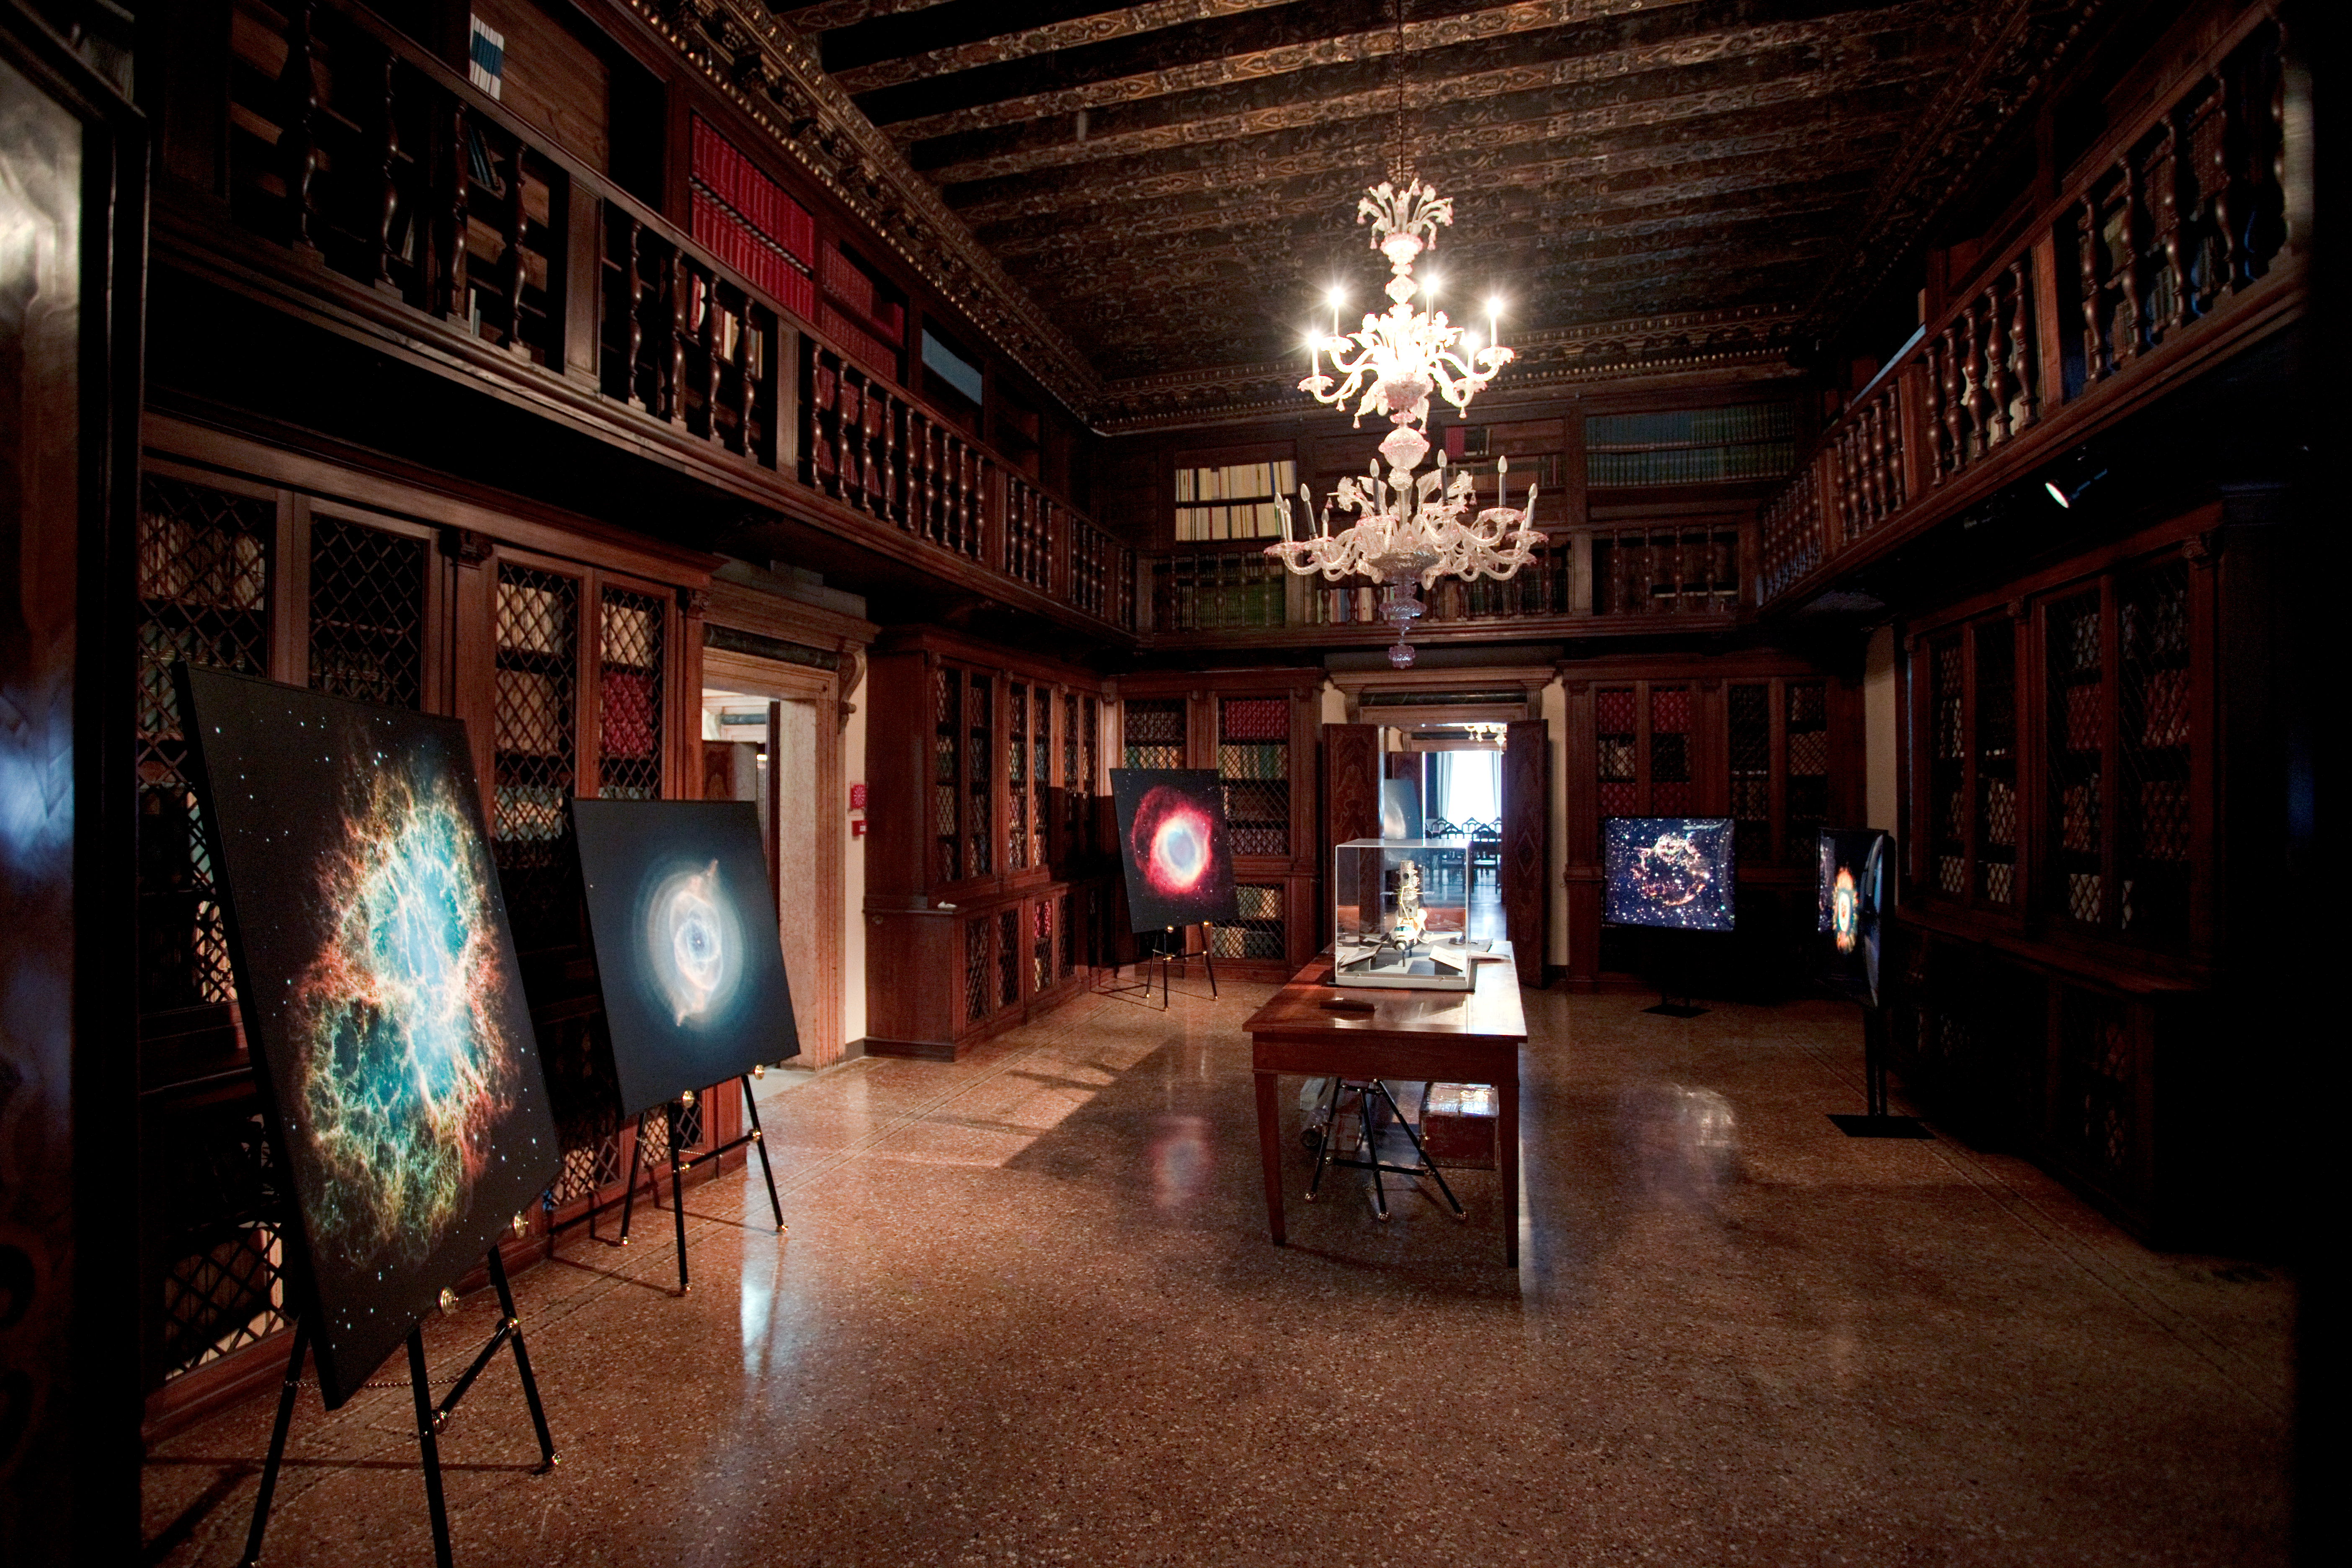

Hubble images on display

This image shows Hubble images of nebulae on display at the “Il telescopio spaziale Hubble alle frontiere dell’universo” exhibition in Venice, Italy in October 2010.

Credit: ESA/Hubble